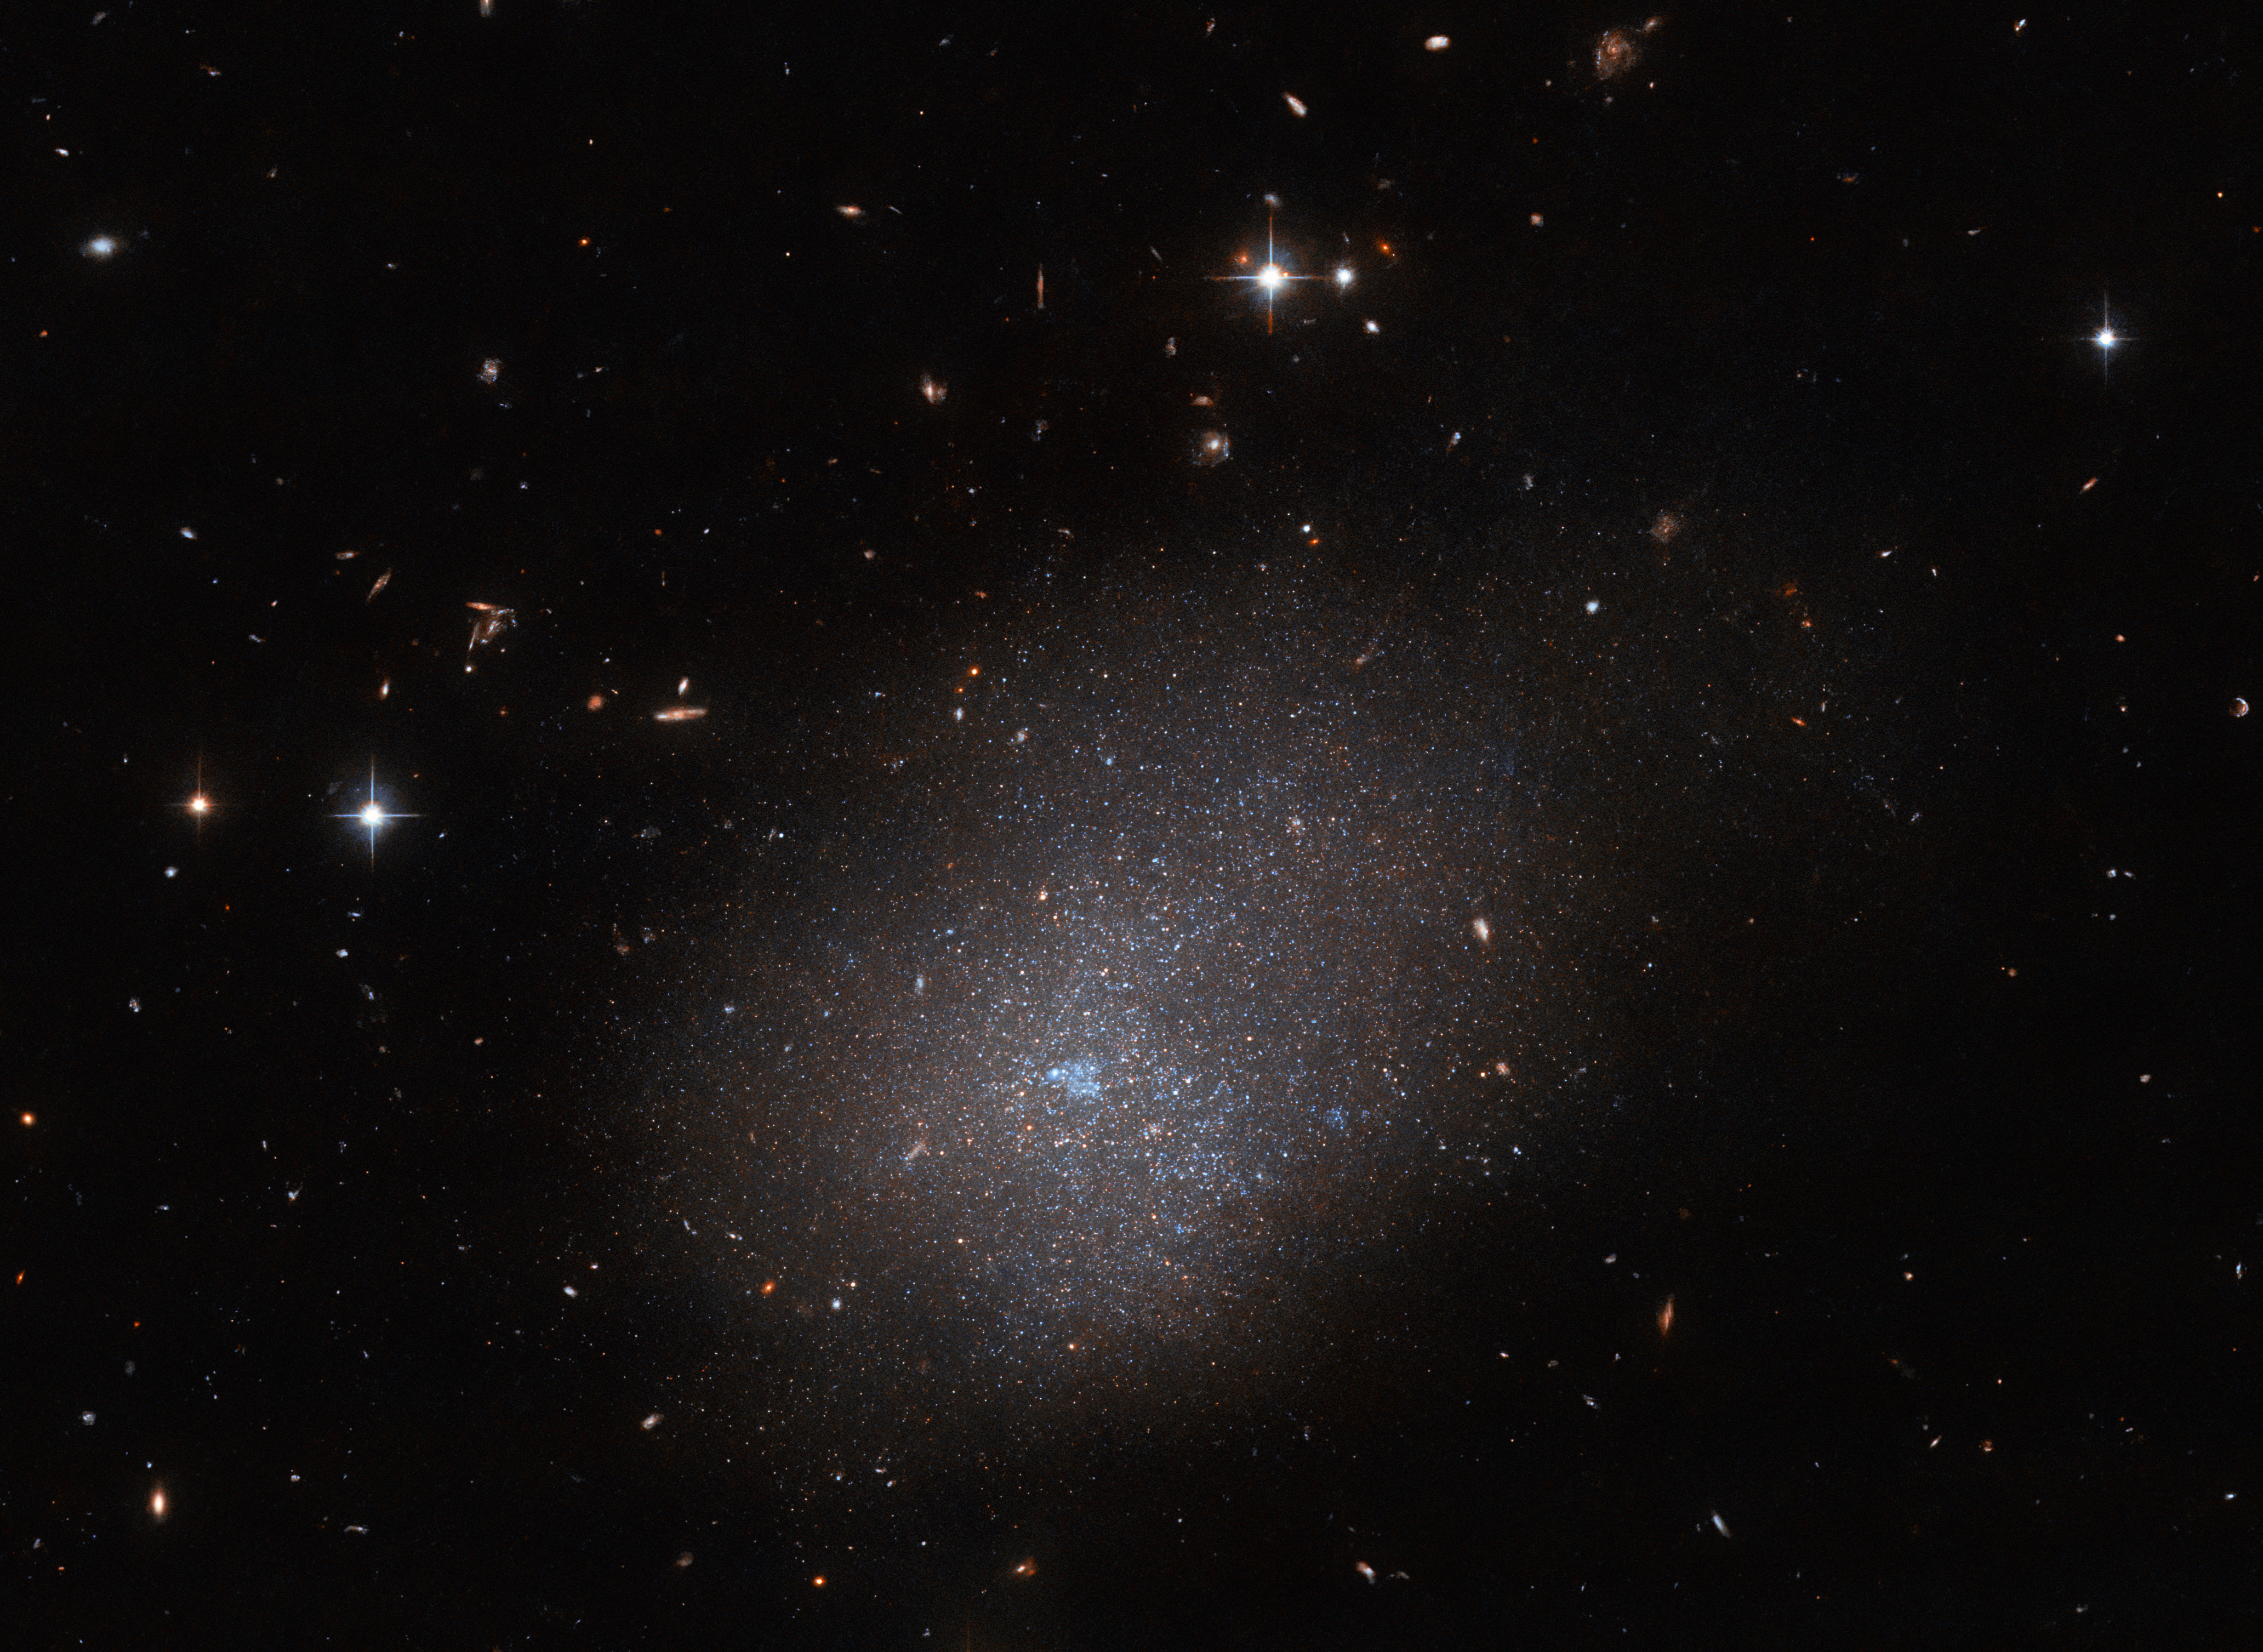

A sparkling galactic neighbour

The galaxy ESO 300-16 looms over this image from the NASA/ESA Hubble Space Telescope. This galaxy, which lies 28.7 million light-years from Earth in the constellation Eridanus, is a ghostly assemblage of stars which resembles a sparkling cloud. A rogue’s gallery of distant galaxies and foreground stars complete this astronomical portrait, which was captured by the Advanced Camera for Surveys.

This observation is one of a series which aims to get to know our galactic neighbours; around three quarters of the known galaxies suspected to lie within 10 megaparsecs of Earth have been observed by Hubble in enough detail to resolve their brightest stars and establish the distances to these galaxies. A team of astronomers proposed using small gaps in Hubble’s observing schedule to acquaint ourselves with the remaining quarter of the nearby galaxies.

The megaparsec — meaning one million parsecs — is a unit used by astronomers to chart the mind-bogglingly large distances involved in astronomy. The motion of Earth around the Sun means that stars appear to slightly shift against very distant stars over the course of a year. This small shift is referred to as parallax and is measured in angular units: degrees, minutes, and seconds. One parsec is equivalent to saying a parallax of one-arcsecond, and is equivalent to 3.26 light-years or 30.9 trillion kilometres. The closest exoplanet to the Sun is Proxima Centauri b, which lies 1.3 parsecs away.

Credit: ESA/Hubble & NASA, R. Tully